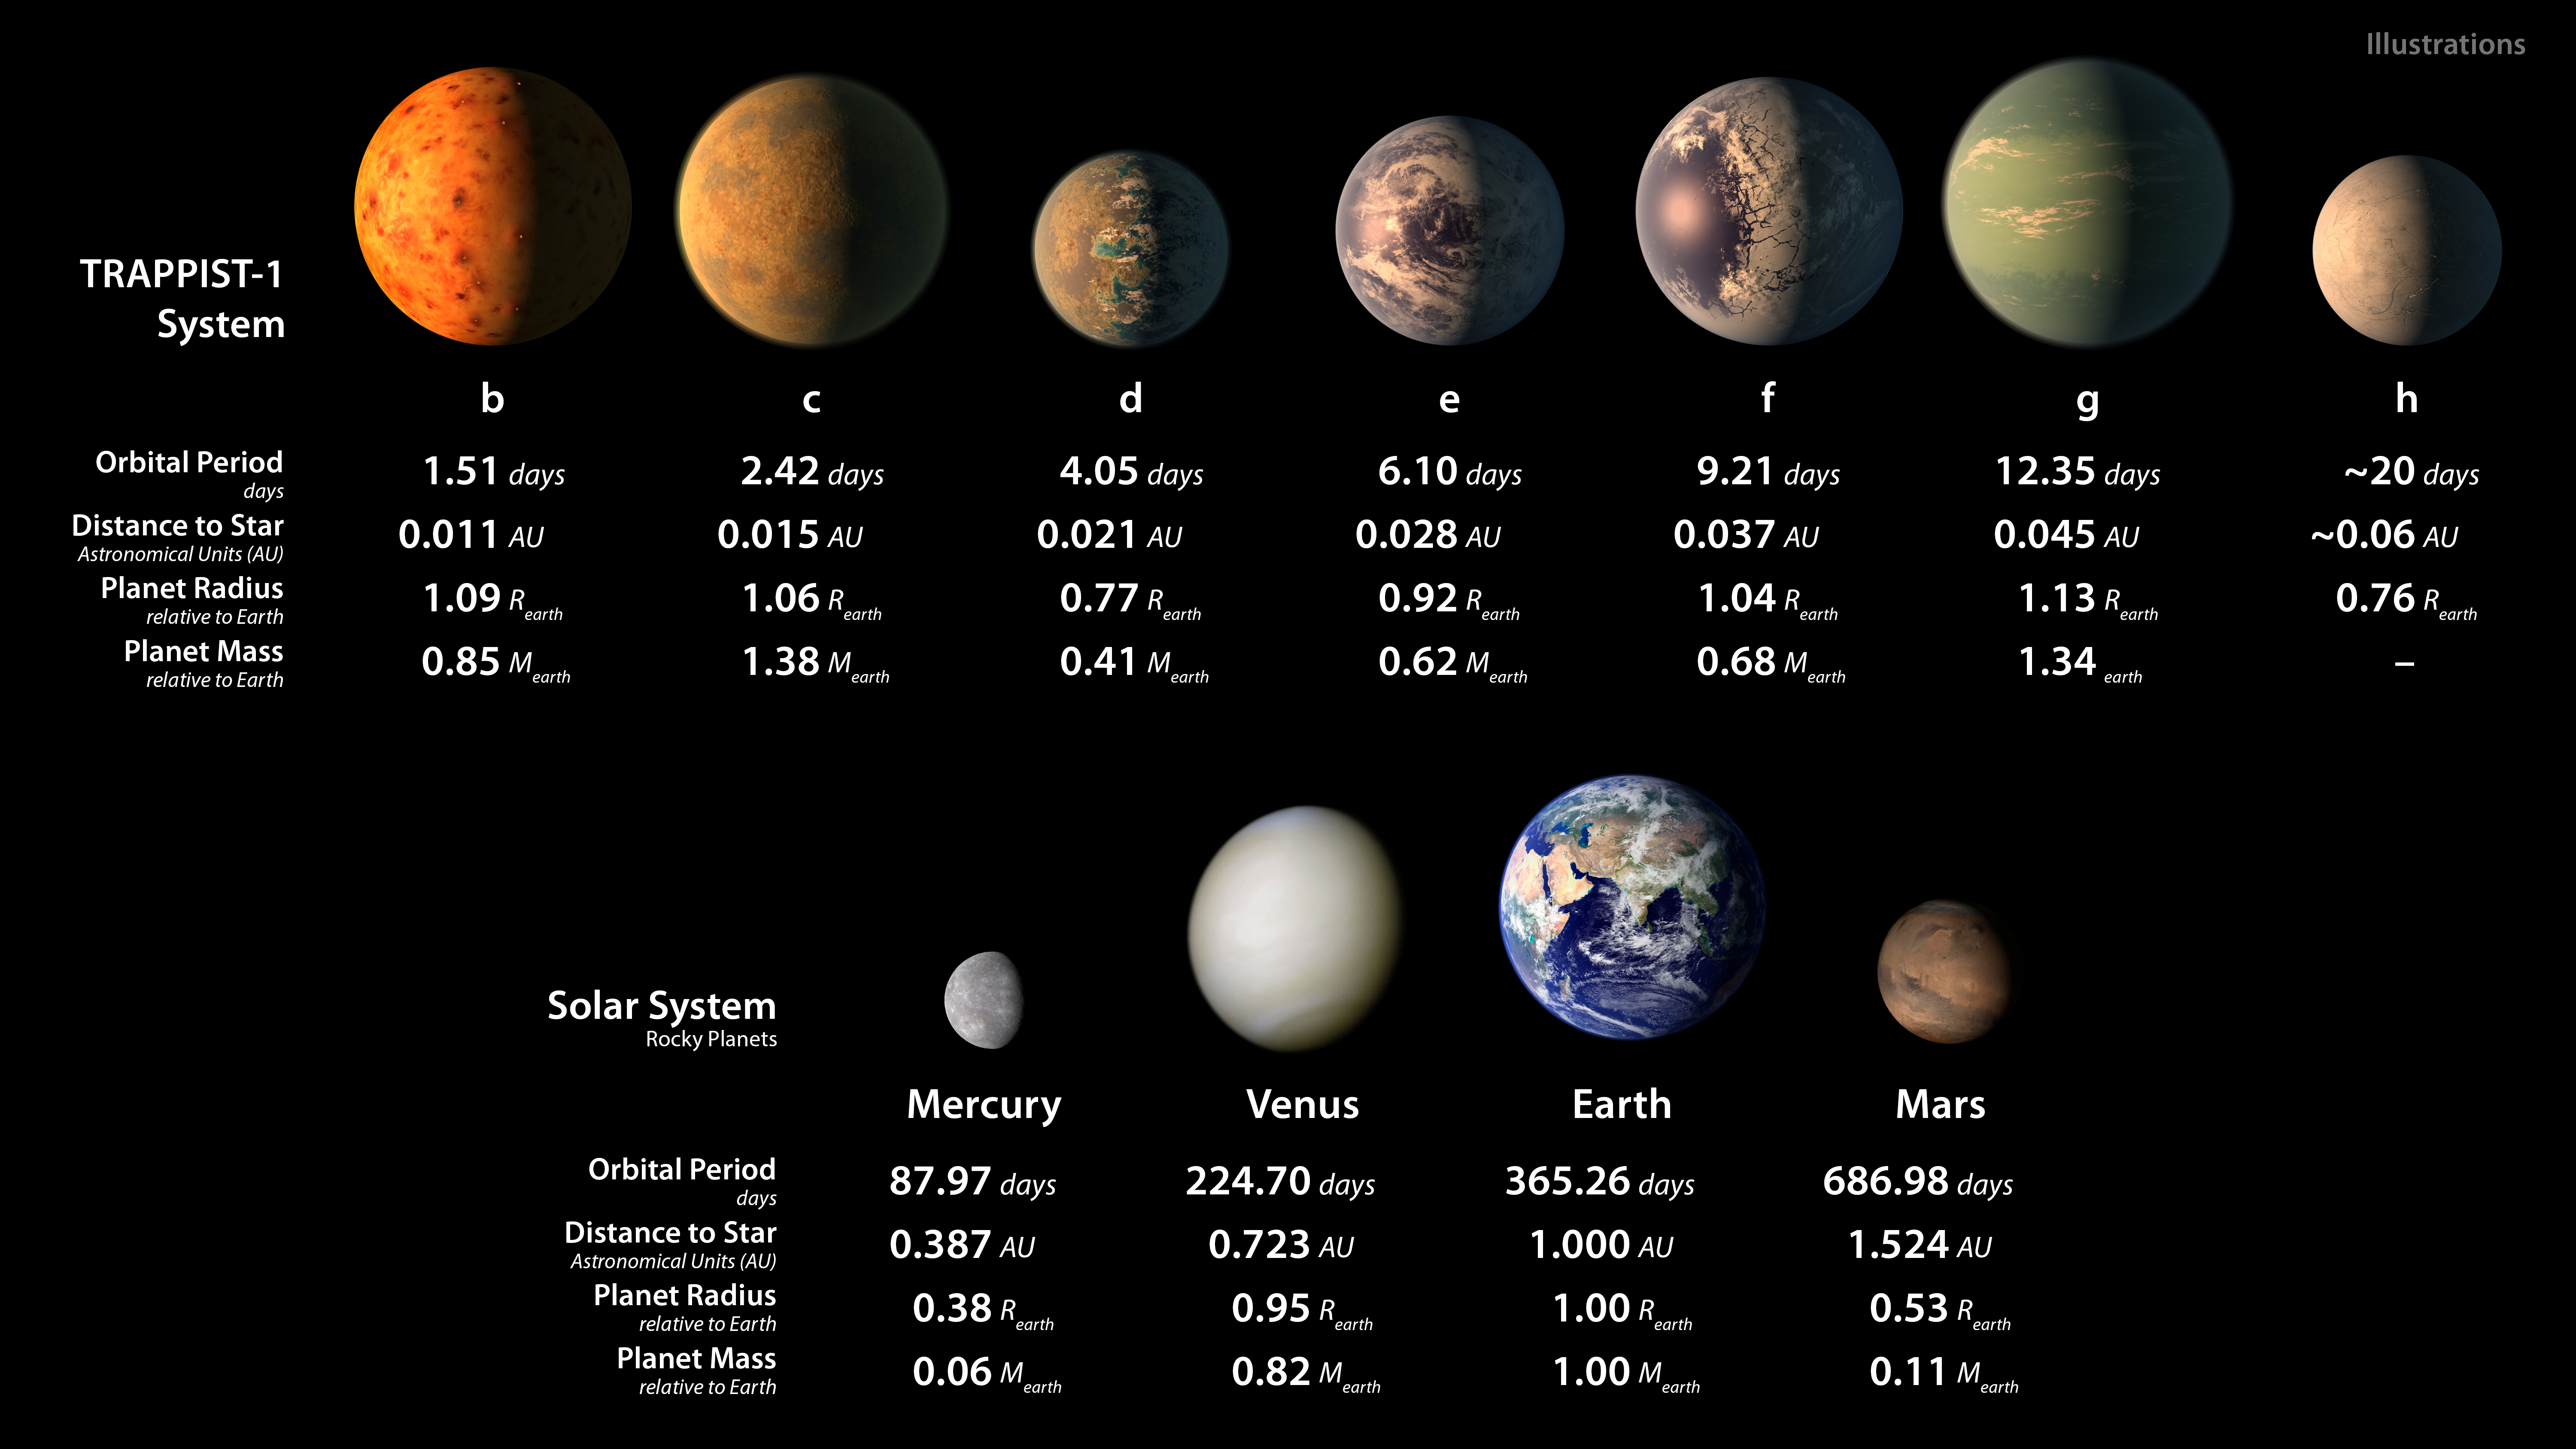

Artist's illustrations of planets in TRAPPIST-1 system and Solar System rocky planets

This infographic displays some artist's illustrations of how the seven planets orbiting TRAPPIST-1 might appear — including the possible presence of water oceans — alongside some images of the rocky planets in our Solar System. Information about the size and orbital periods of all the planets is also provided for comparison; the TRAPPIST-1 planets are all approximately Earth-sized.

Credit: NASA